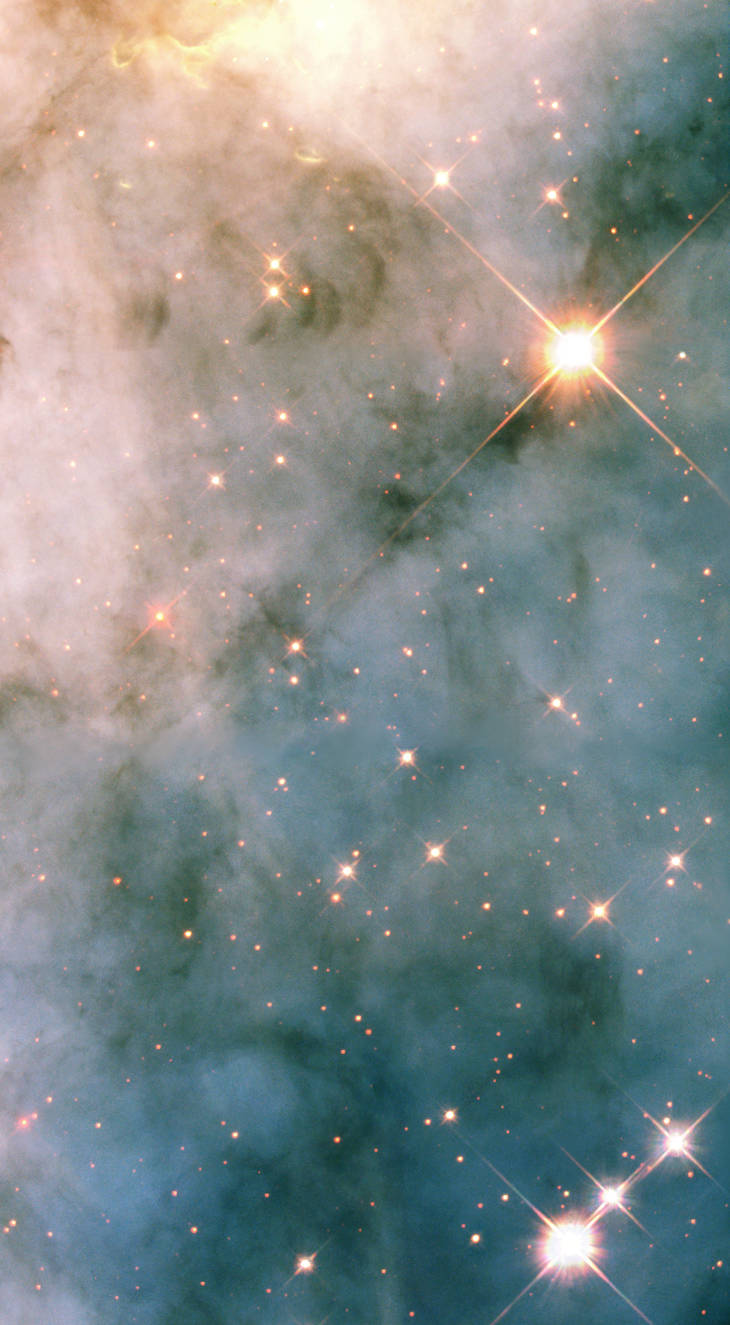

Hubble photographs turbulent neighborhood near eruptive star

A small portion of the rough-and-tumble neighborhood of swirling dust and gas near one of the most massive and eruptive stars in our galaxy is seen in this NASA/ESA Hubble Space Telescope image. This close-up view shows only a three light-year-wide portion of the entire Carina Nebula, which has a diameter of over 200 light-years. Located 8,000 light-years from Earth, the nebula can be seen in the southern sky with the naked eye.

Dramatic dark dust knots and complex structures are sculpted by the high-velocity stellar winds and high-energy radiation from the ultra-luminous variable star called Eta Carinae, or Eta Car (located outside the picture). This image shows a region in the Carina Nebula between two large clusters of some of the most massive and hottest known stars.

Credit: NASA/ESA and The Hubble Heritage Team (AURA/STScI)